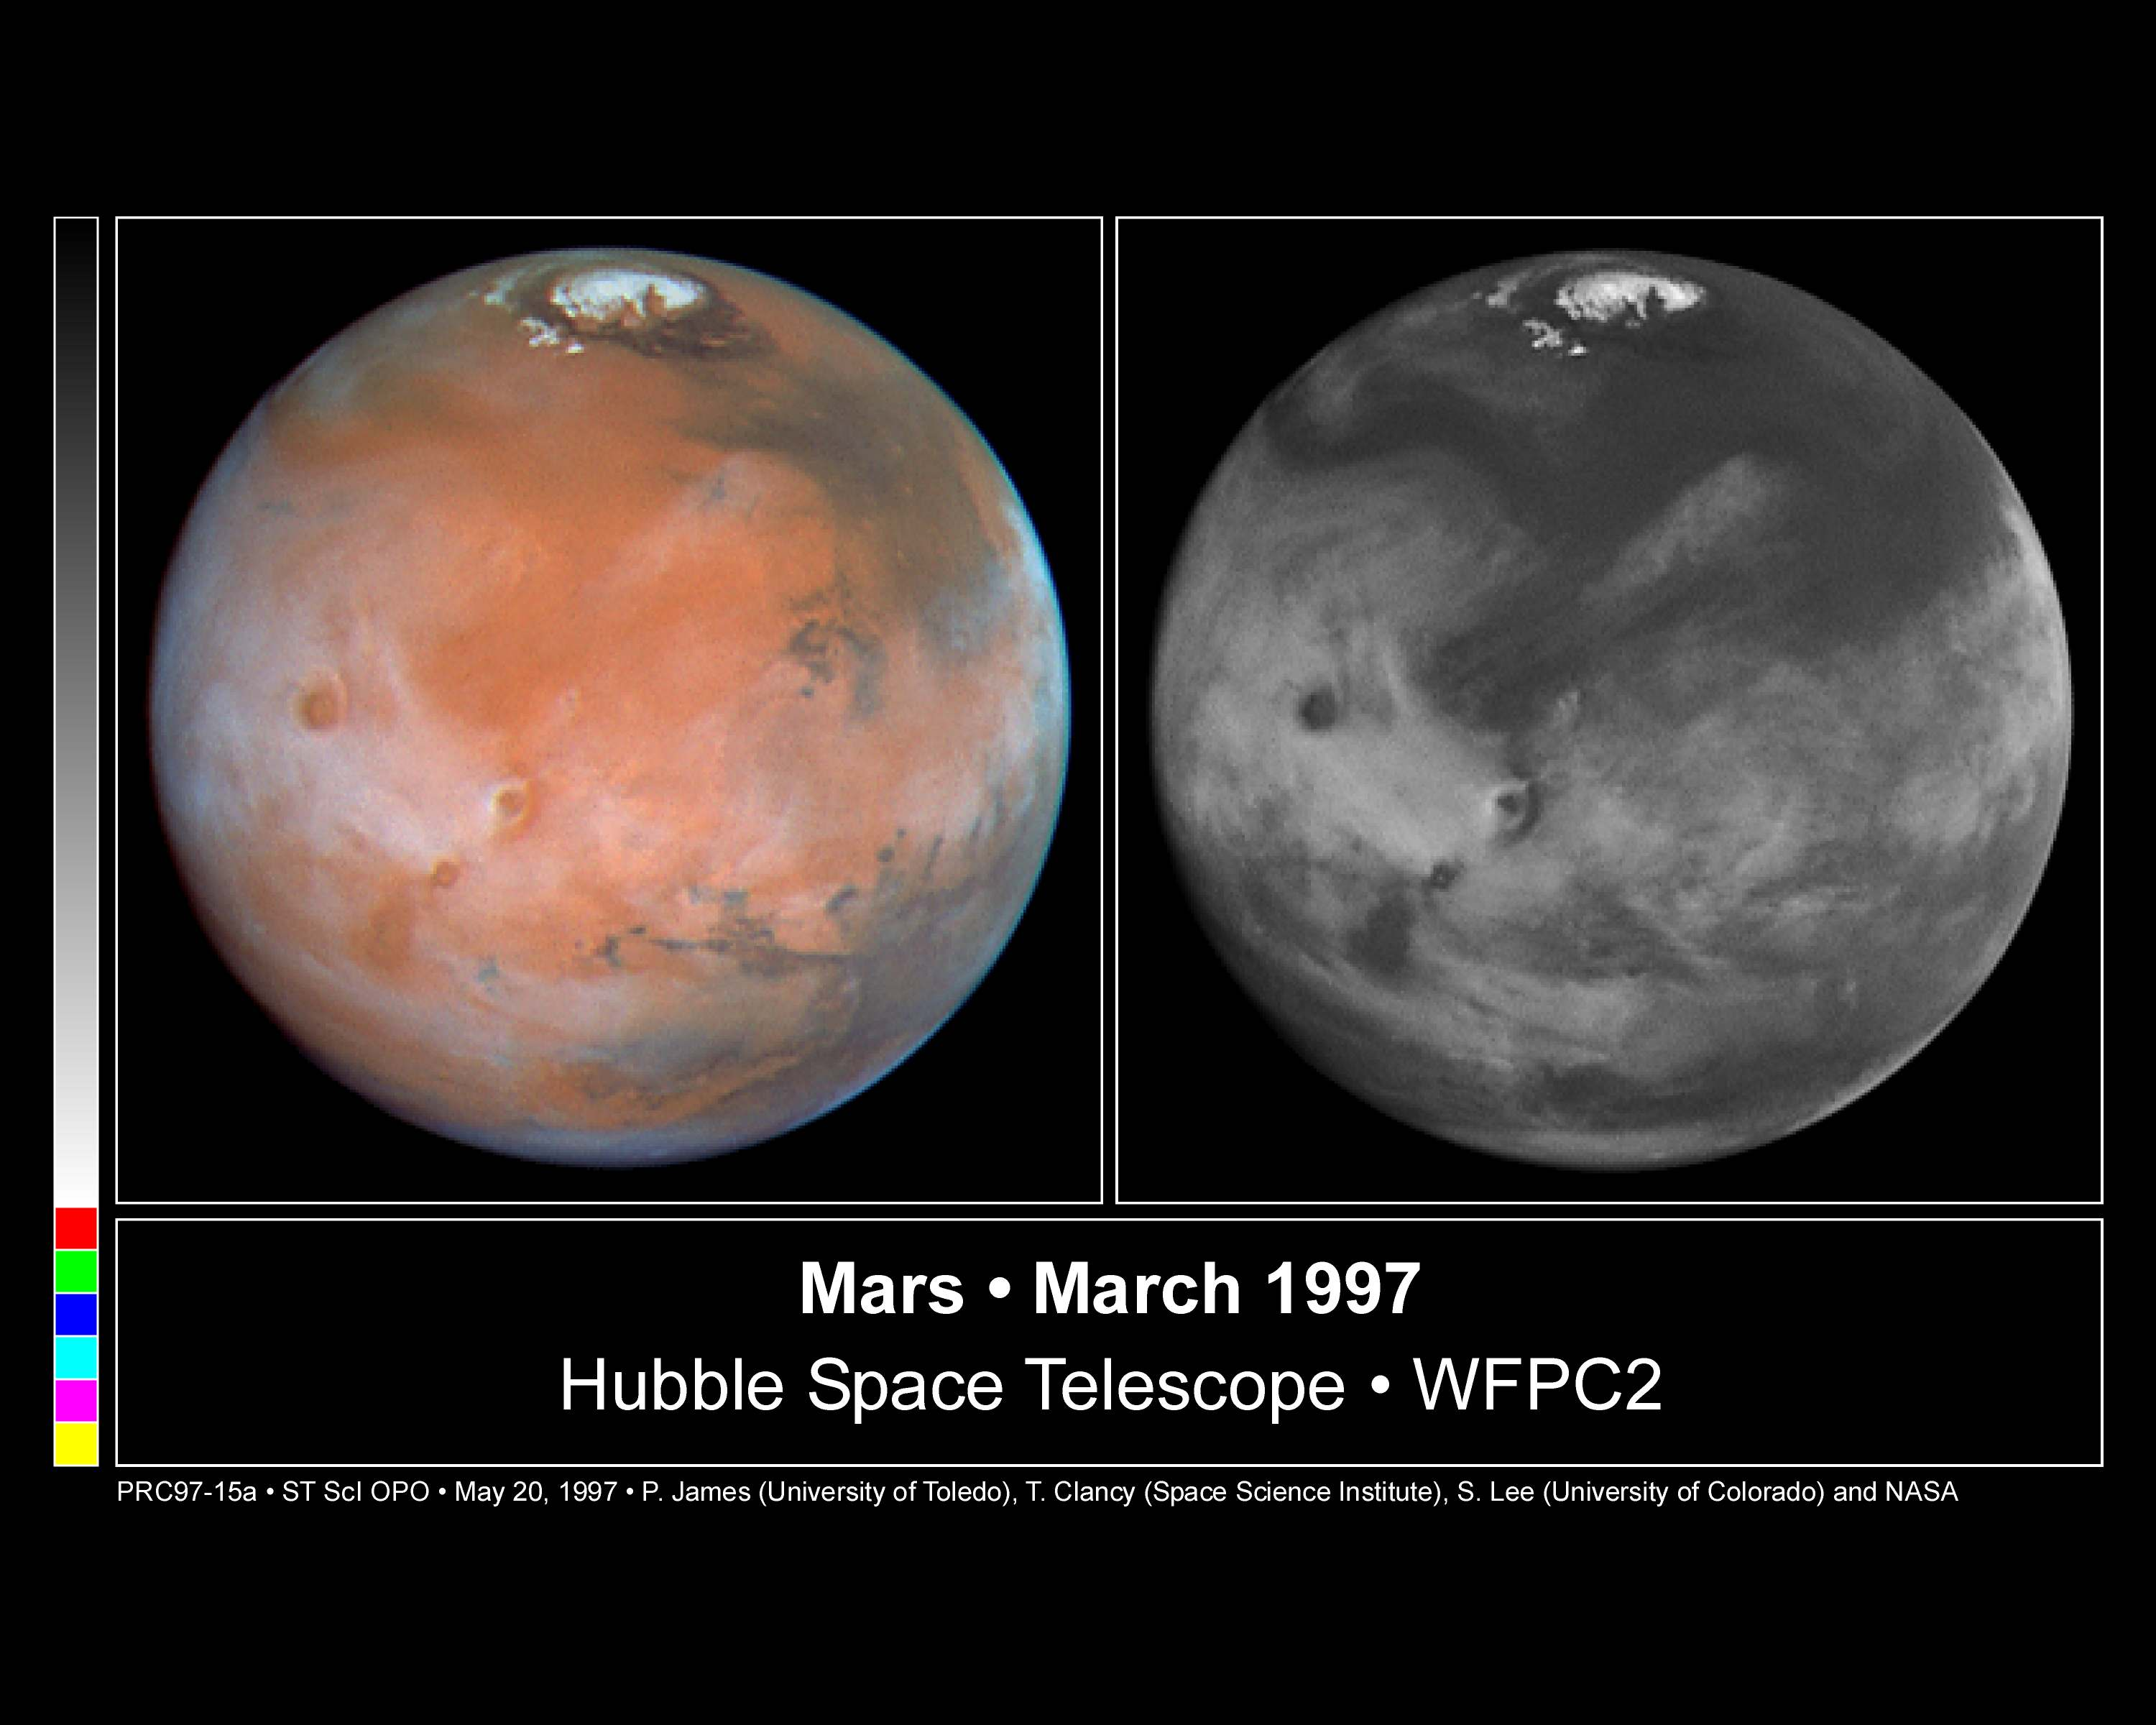

Comparison View of Mars Cloud Cover

These colour and black and white pictures of Mars were taken by the NASA/ESA Hubble Space Telescope just two weeks after Earth made it's closest approach to the Red Planet during the 1997 opposition. When the Hubble pictures were taken Mars was at a distance of 62 million miles (100 million kilometers) and the resolution at the center of the disk is 13.5 miles/pixel (22 kilometers/pixel).

Both images were made with the Wide Field and Planetary Camera 2.

Credit: Phil James (Univ. Toledo), Todd Clancy (Space Science Inst., Boulder, CO), Steve Lee (Univ. Colorado), and NASA/ESA